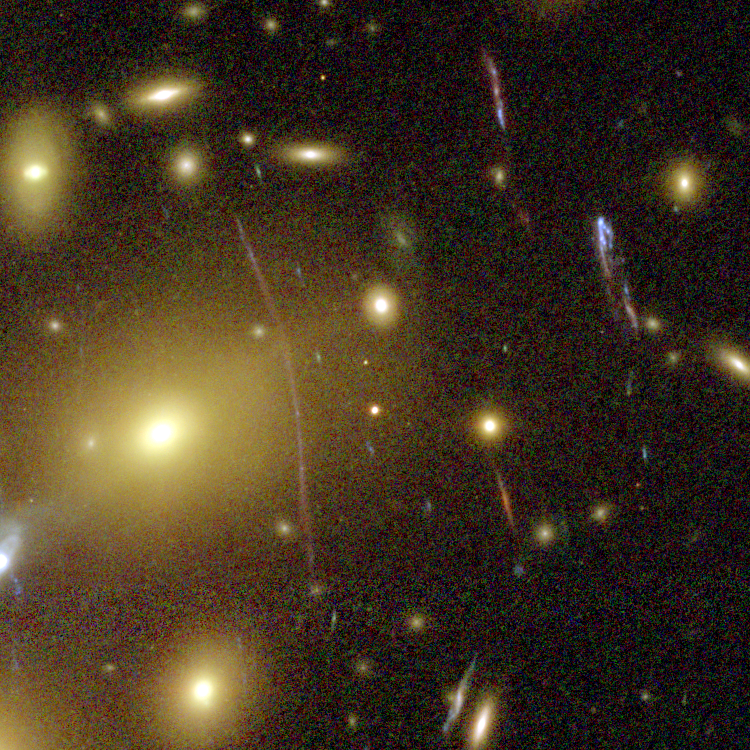

Galaxy Cluster Abell 1689 Details

The Advanced Camera for Surveys (ACS) aboard NASA's Hubble Space Telescope has here used a natural "zoom lens" in space to peer straight through the center of one of the most massive galaxy clusters known, called Abell 1689. Some of the faintest objects in this picture are probably more than 13 billion light-years away.

Credit: NASA, N. Benitez (JHU), T. Broadhurst (The Hebrew University), H. Ford (JHU), M. Clampin(STScI), G. Hartig (STScI), G. Illingworth (UCO/Lick Observatory), the ACS Science Team and ESA